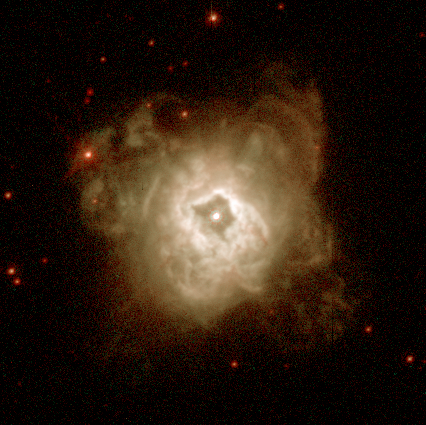

NGC 5315

This image is a part of the Hubble Gallery of Planetary Nebulae.

Credit: Howard Bond (ST ScI) and NASA/ESA